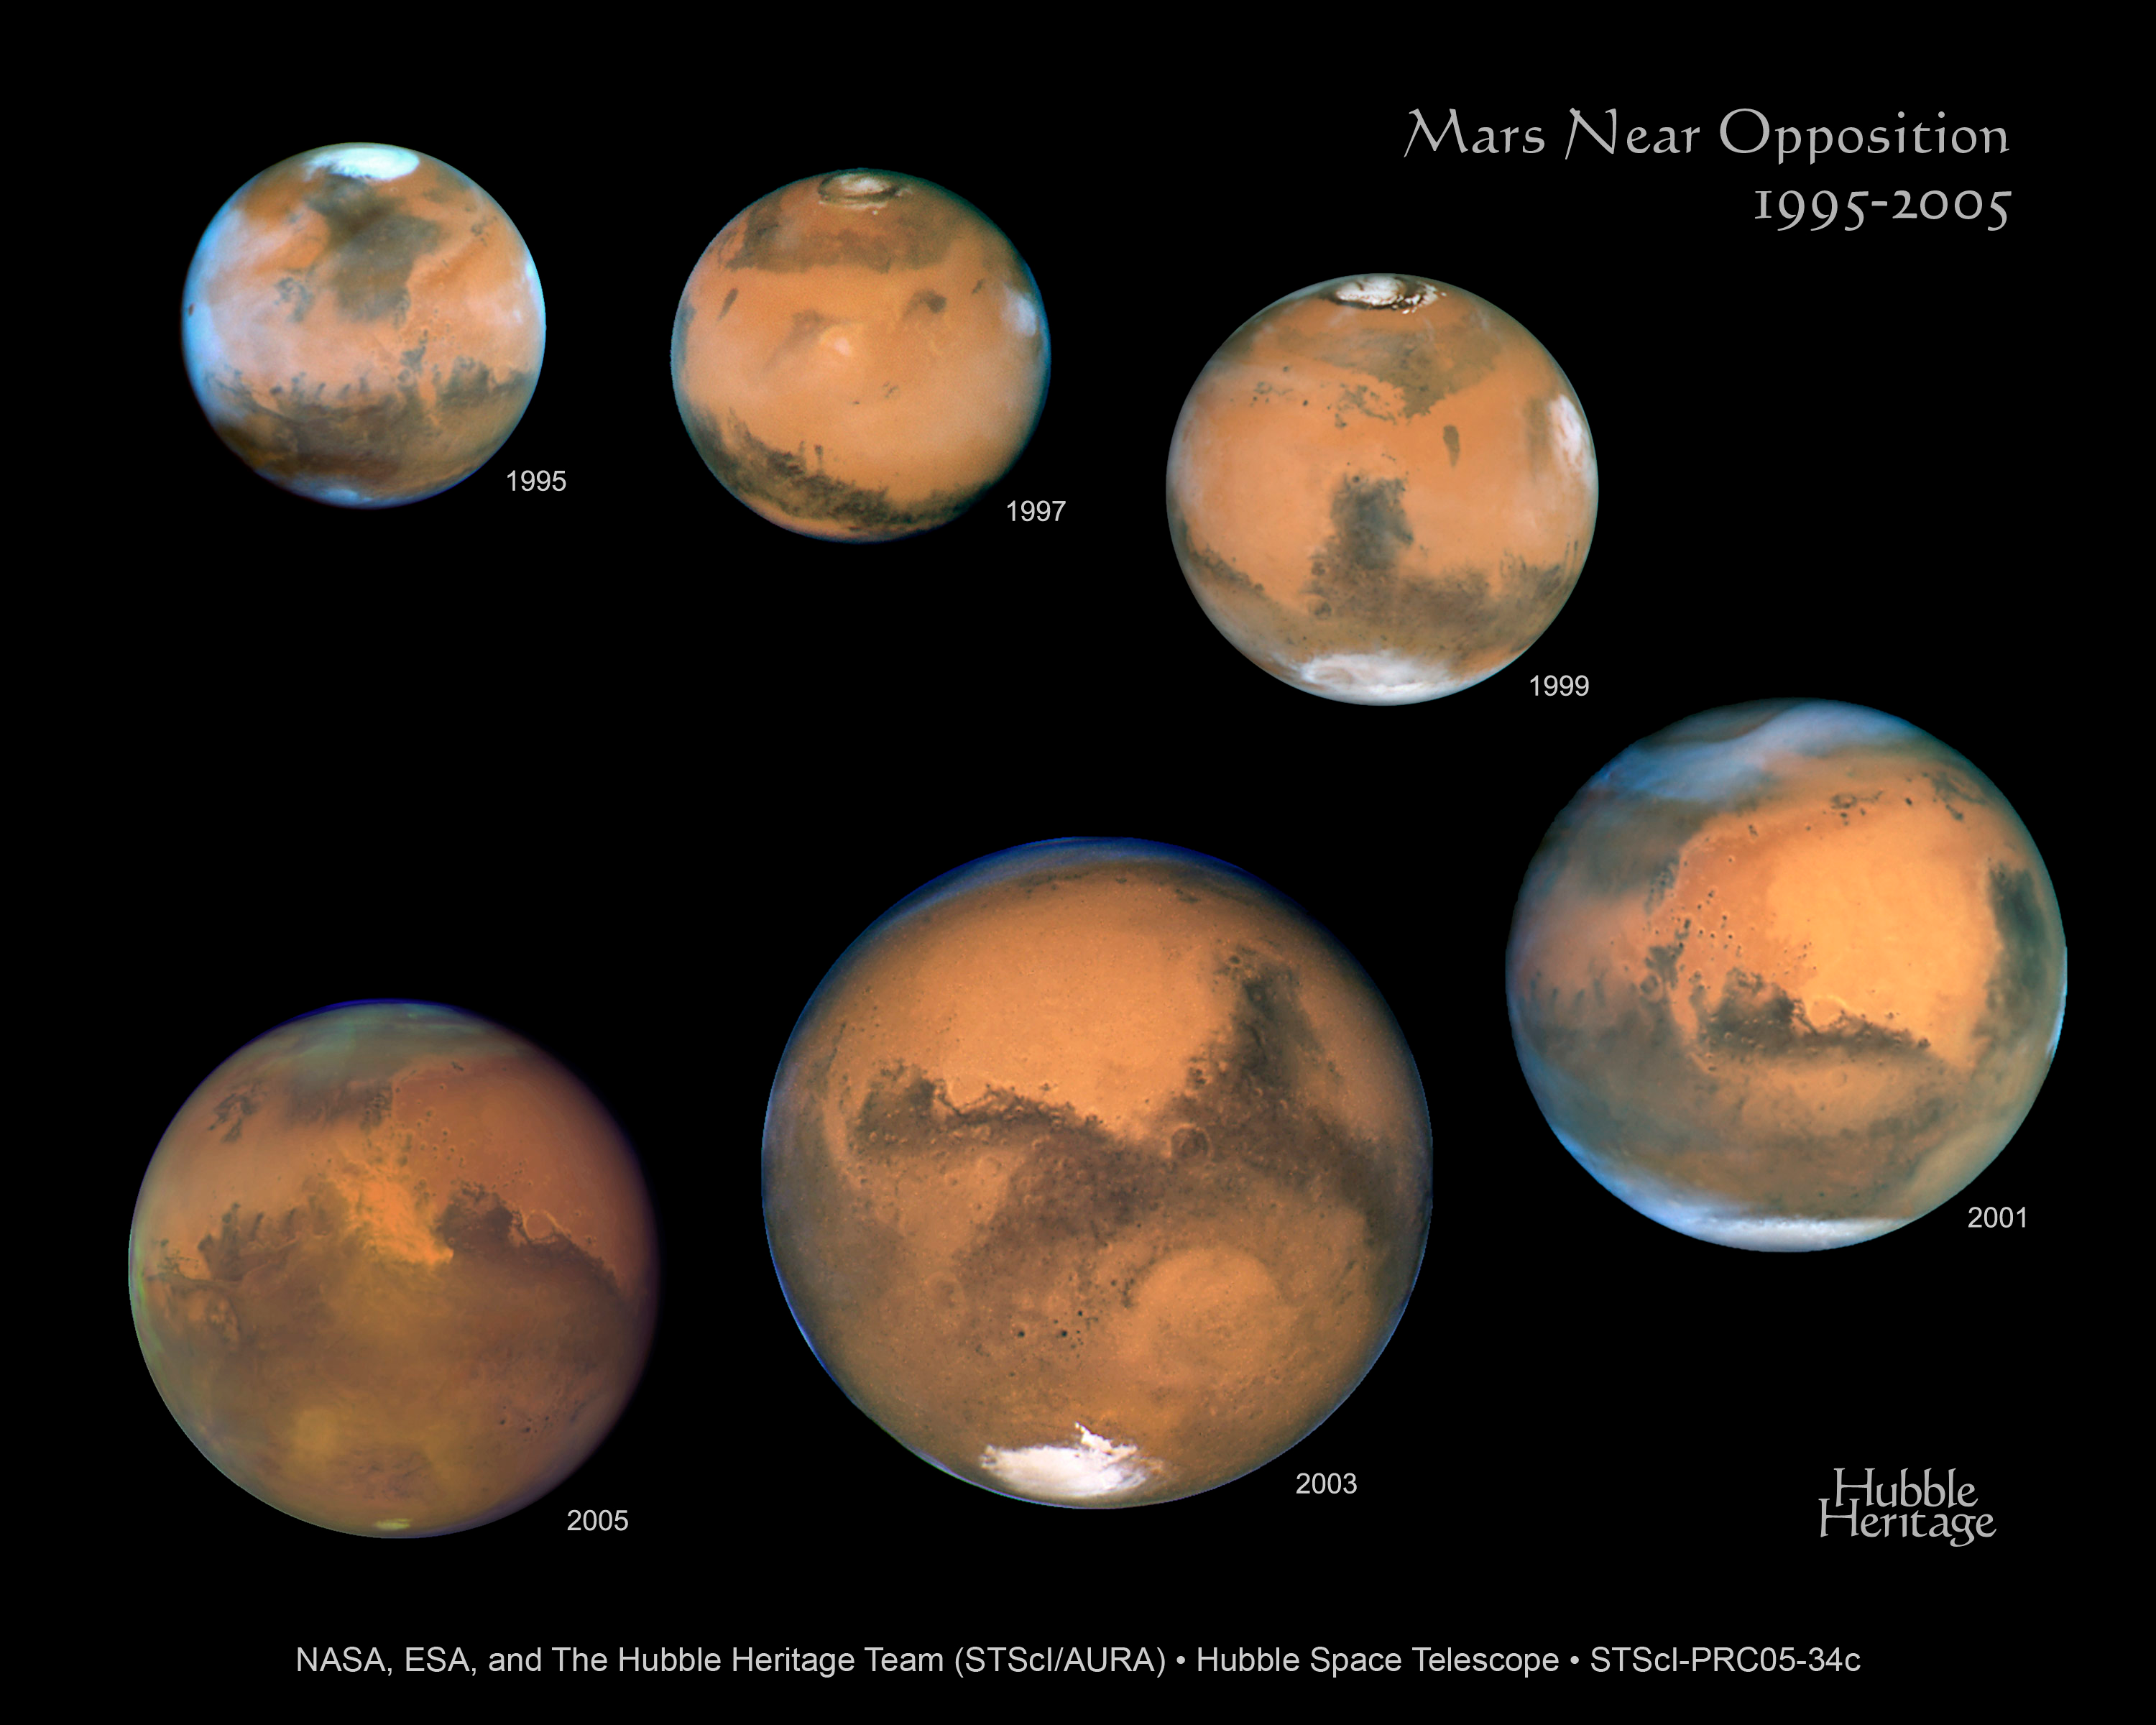

Hubble's visual history of Mars

The orbits of the planets Earth and Mars provide a geometric line up that is out of this world! Every 26 months Mars is opposite the Sun in our nighttime sky. Since the repair of the Hubble telescope in 1993, Mars has been at such an "opposition" with the Sun six times. A colour composite from each of the six Hubble opposition observations has been assembled in this mosaic to showcase the beauty and splendor that is "The Red Planet."

Credit: NASA, ESA, and The Hubble Heritage Team STScI/AURA)